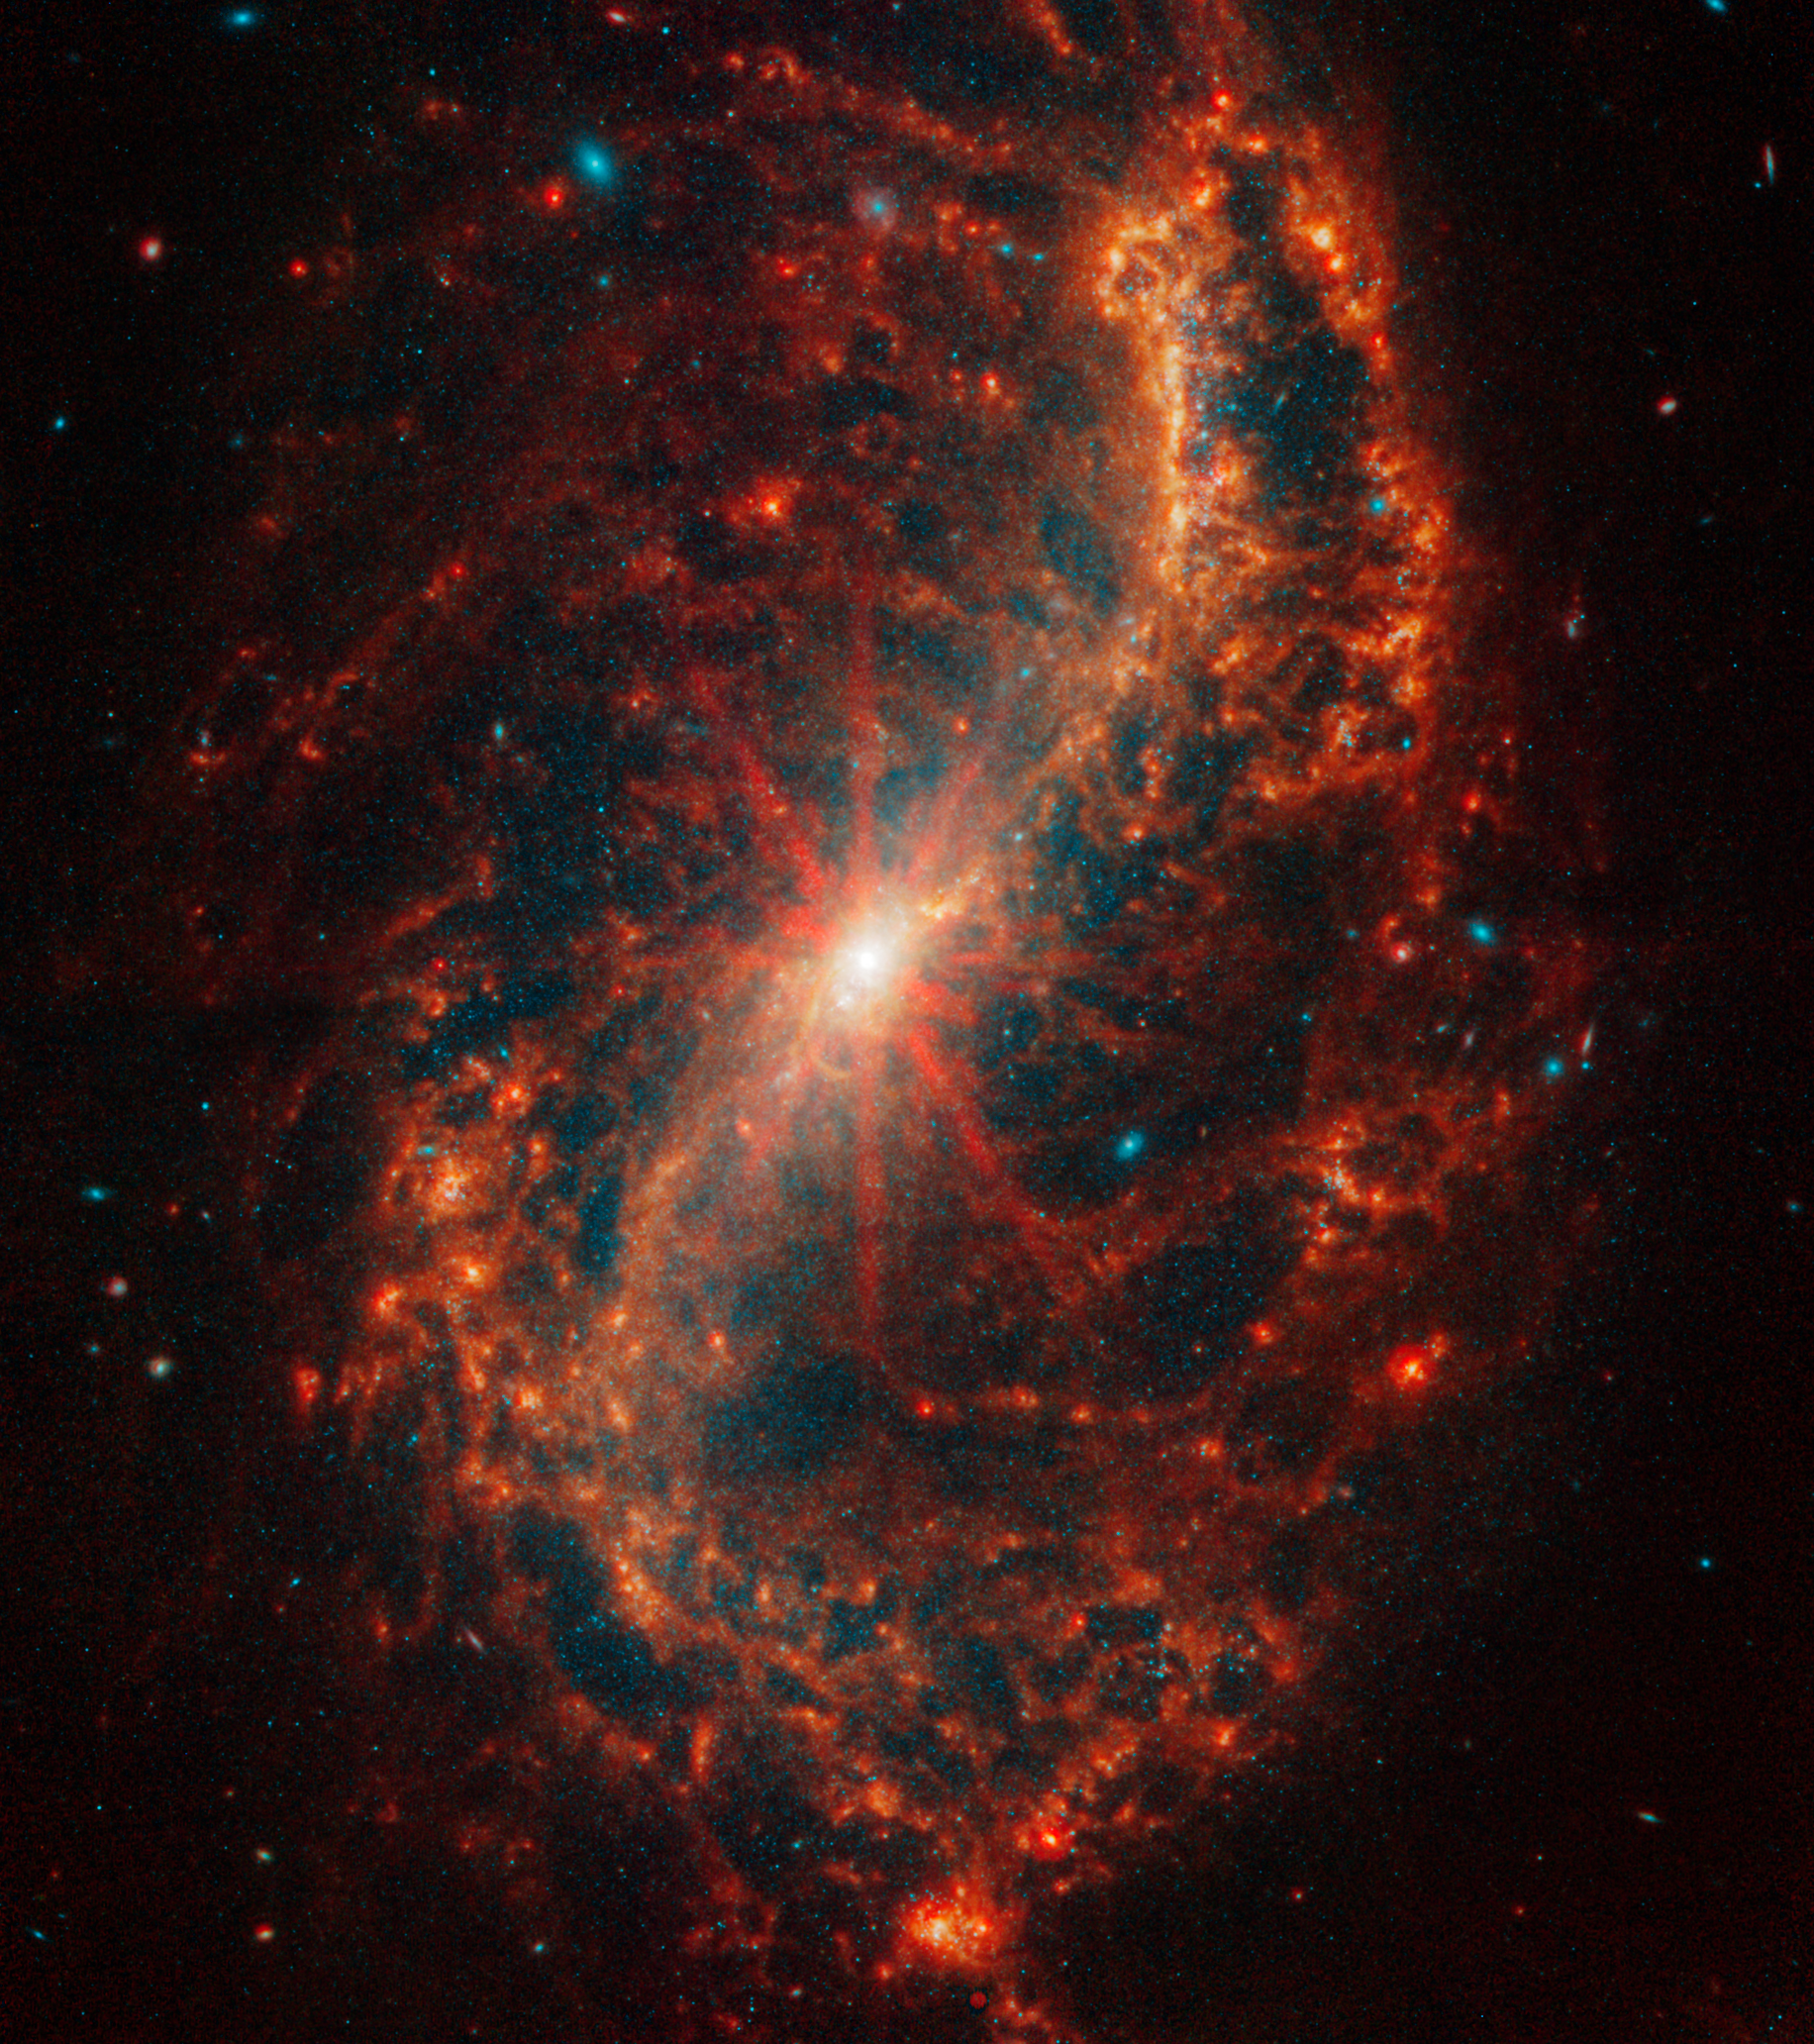

NGC 7496

This spiral galaxy was observed as part of the Physics at High Angular resolution in Nearby GalaxieS (PHANGS) program, a large project that includes observations from several space- and ground-based telescopes of many galaxies to help researchers study all phases of the star formation cycle, from the formation of stars within dusty gas clouds to the energy released in the process that creates the intricate structures revealed by Webb’s new images.

NGC 7496 is 24 million light-years away in the constellation Grus.

Learn more about what can be seen in this vast collection of Webb images here.

Credit: NASA, ESA, CSA, STScI, J. Lee (STScI), T. Williams (Oxford), PHANGS Team